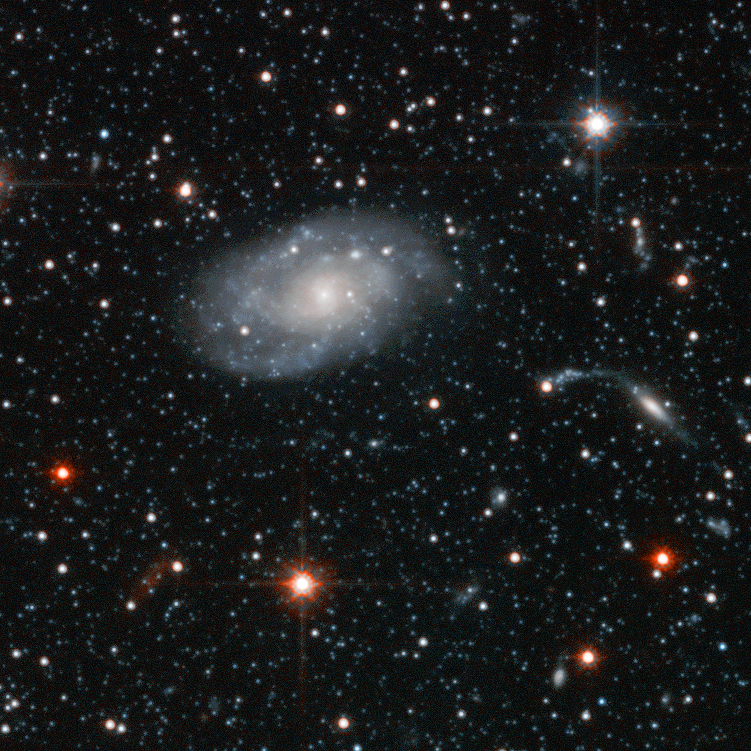

Andromeda Galaxy Halo Details - 1

Relying on the deepest visible-light images ever taken in space, astronomers using NASA's Hubble Space Telescope (HST) have reliably measured the age of the spherical halo of stars surrounding the neighboring Andromeda galaxy (M31). To their surprise, they have discovered that approximately one-third of the stars in Andromeda's halo formed only 6 to 8 billion years ago. That's a far cry from the 11-to-13 billion-year age of the stars in the Milky Way's halo.

Credit: NASA, ESA and T.M. Brown (STScI)